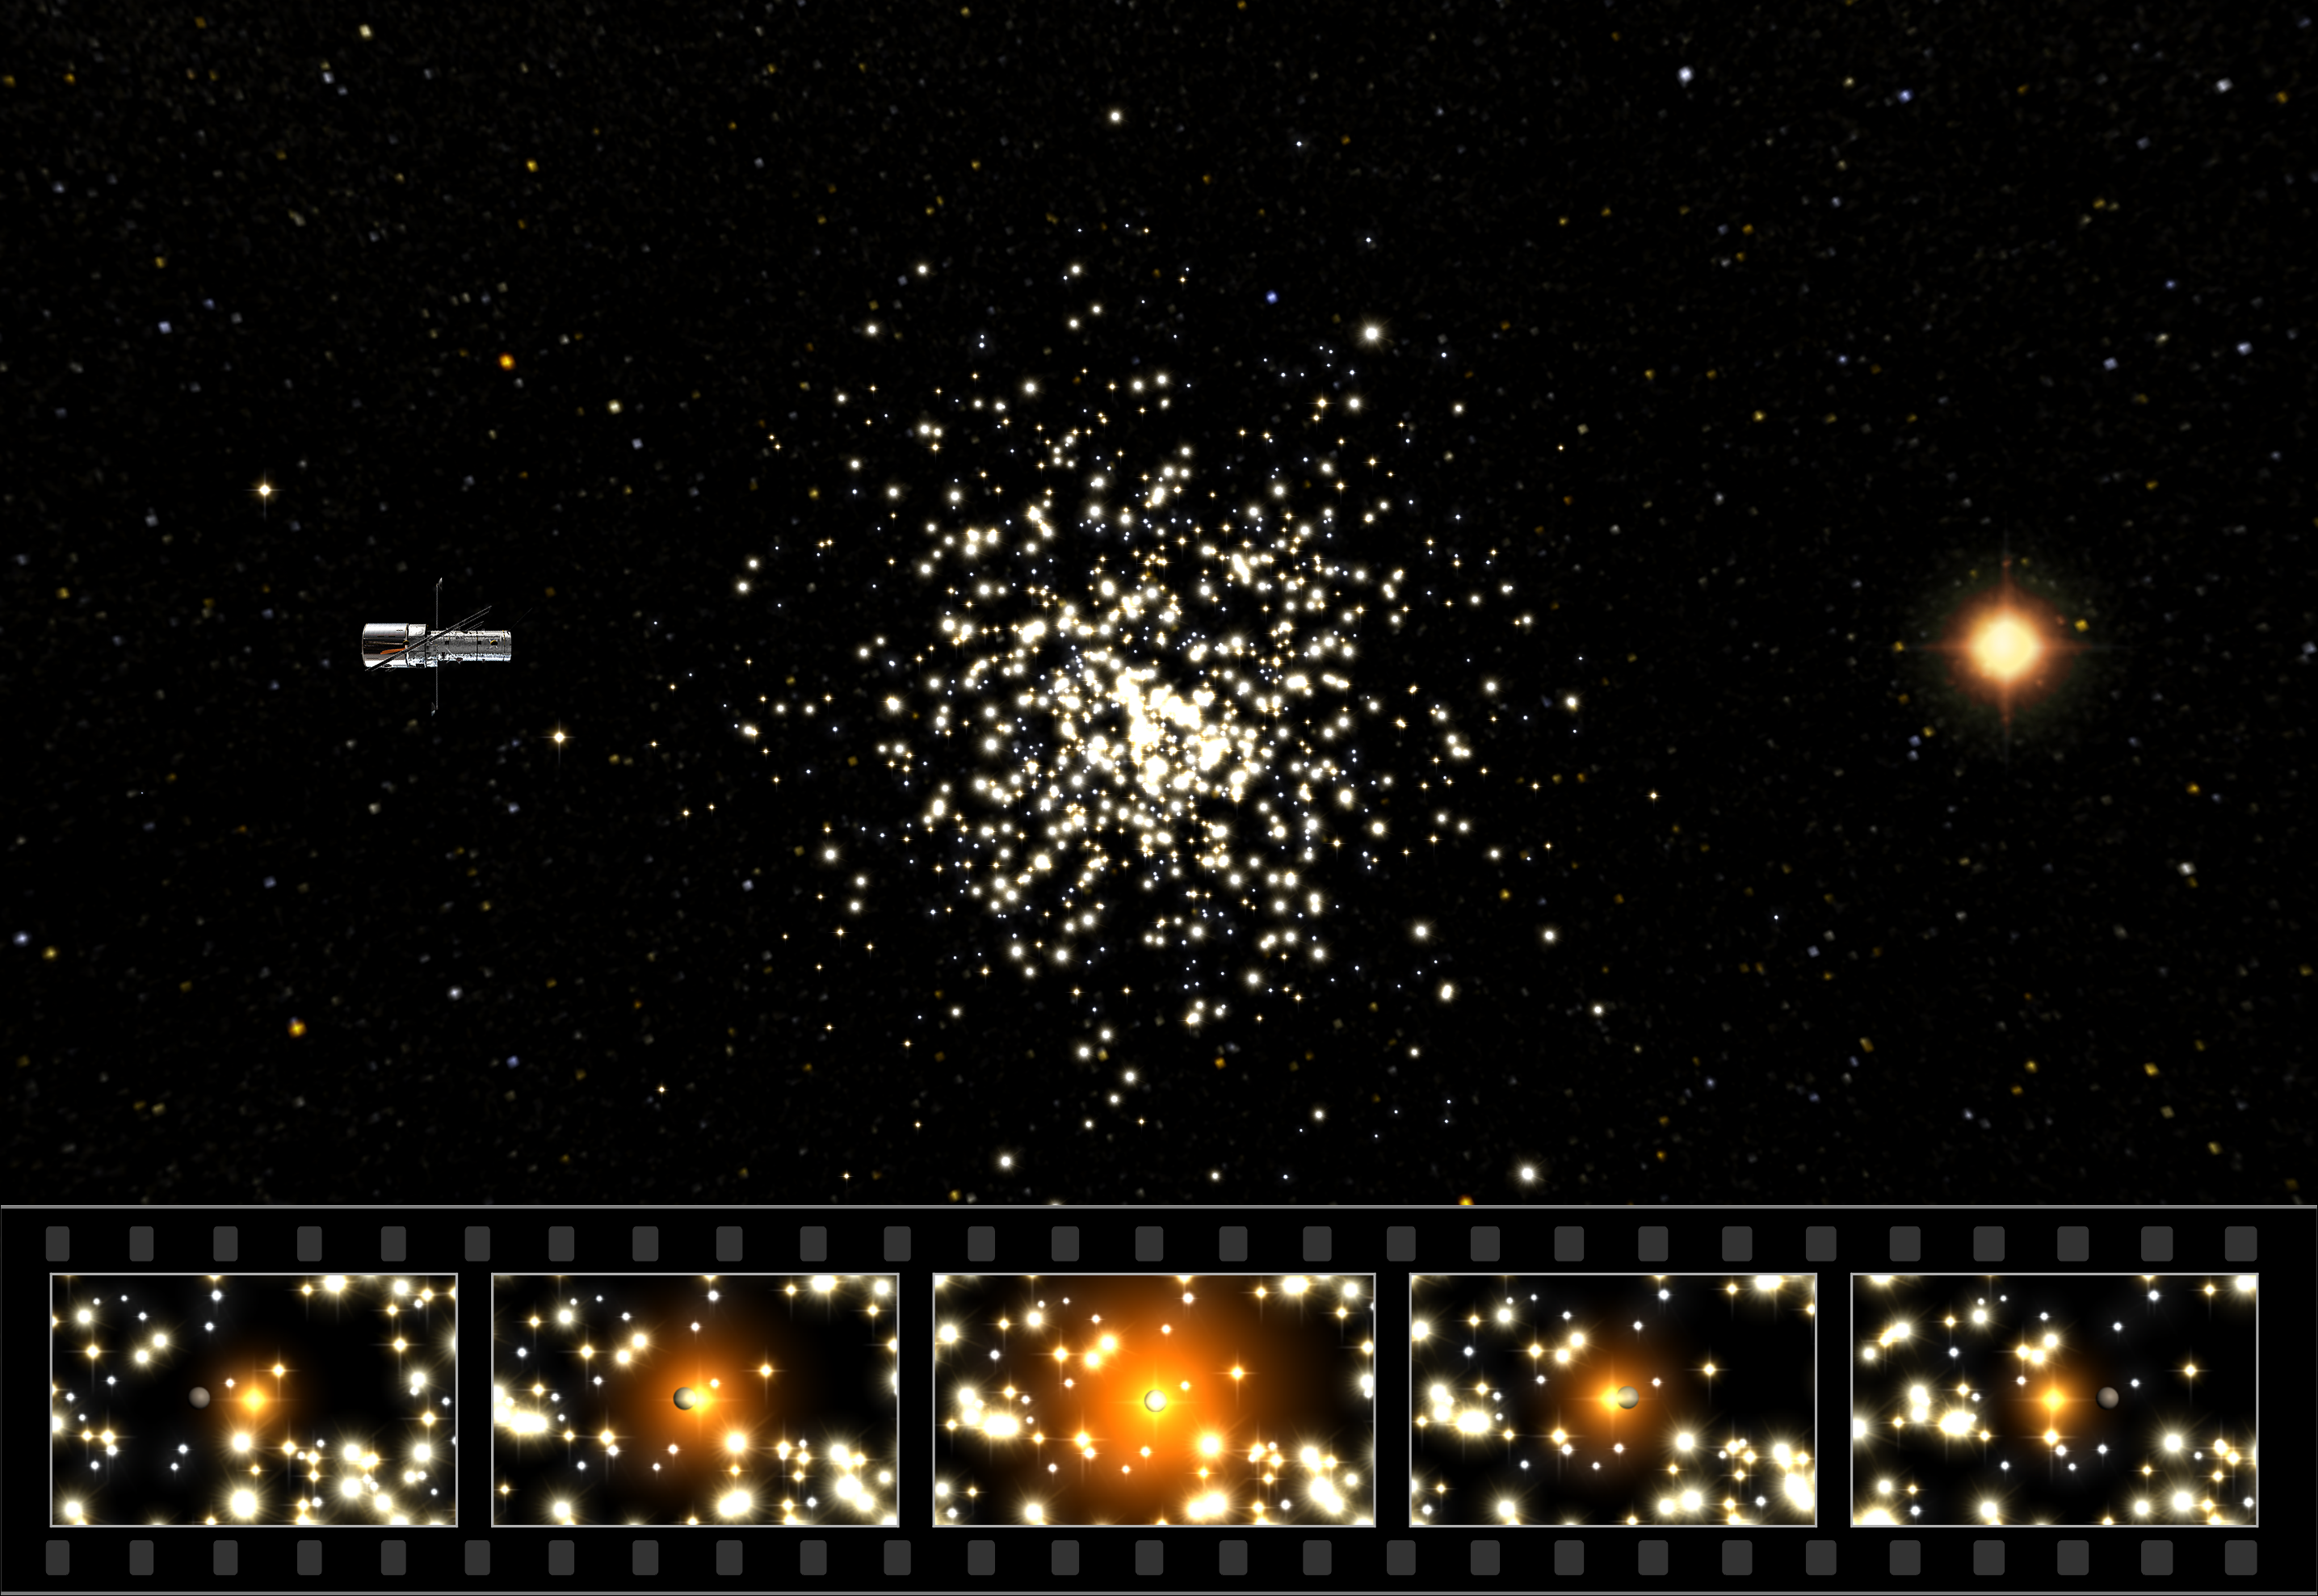

Microlensing in M22

This schematic illustration shows how the NASA/ESA Hubble Space Telescope observes microlensing events in the globular cluster M22. Hubble (to the left) observes a faint background star in the Milky Way bulge (shown to the right) through the myriad stars of M22. In the 'film strip', shown below, a possible 'free-floating' planet-sized object in M22 passes in front of the red background star and briefly magnifies its light. Note that the distances and sizes in this artist's rendering have been exaggerated for the sake of clarity. Also worth noting is that in the six actual Hubble observations the planet-sized objects were not visible in themselves, but only revealed their presence through their gravitational focussing of the light from the background stars. In each of the six microlensing events only one Hubble observation 'sampled' the brightening of the star (frame 3 in this sequence). This means that the estimate for the mass of the planet-sized object will 'only' be an upper estimate (of 80 Earth-masses).

Credit: ESA & Hubble European Space Agency Information Centre (M. Kornmesser & L. L. Christensen). Background star map: ESA (Jos de Bruijne & Hubble European Space Agency Information Centre),